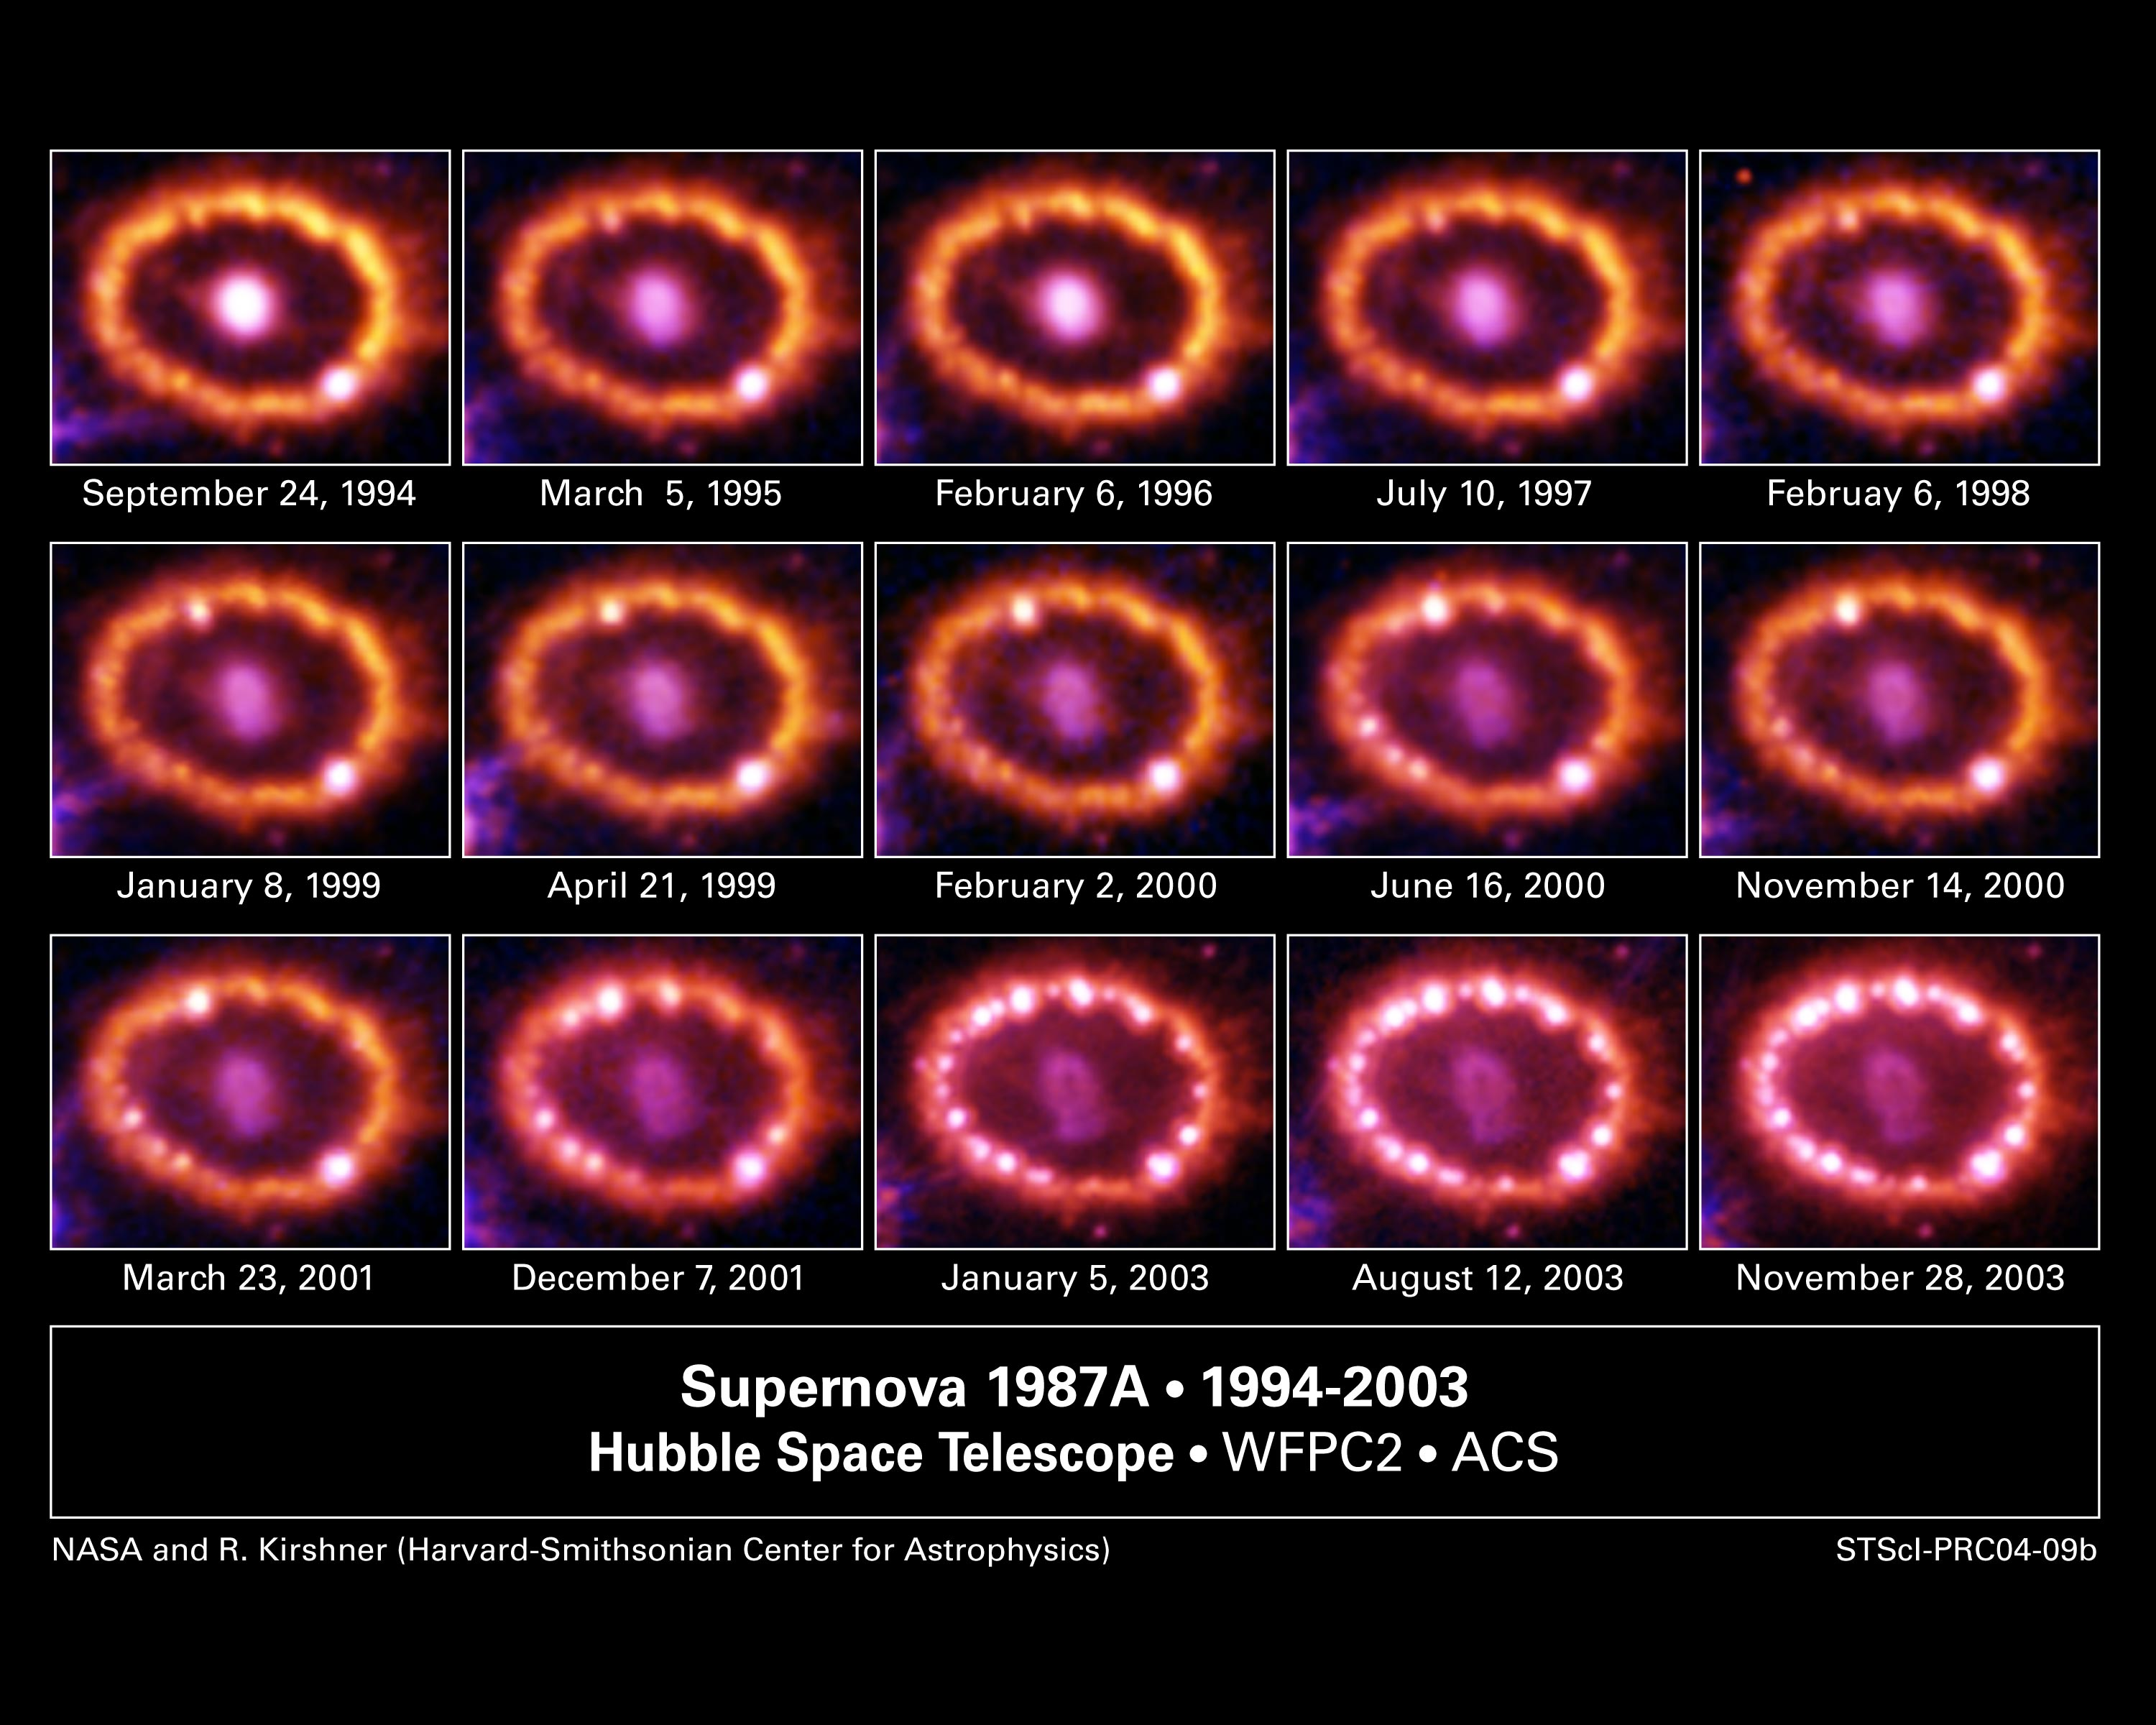

Hubble Supernova 1987A Scrapbook (1994-2003)

Since its launch in 1990, NASA/ESA Hubble Space Telescope has watched a celestial drama unfold at a stellar demolition site. A shock wave unleashed during a stellar explosion, called Supernova 1987A (SN 1987A), has been racing toward a ring of matter encircling the blast site. Astronomers used Hubble to monitor the ring for signs of the impending bombardment. They detected the first evidence of a collision in 1996 [the bright spot at 11 o'clock in the Feb. 6, 1998 image]. Subsequent observations show dozens more "hot spots" as the blast wave slammed into the ring, compressing and heating the gas, and making it glow.

Credit: NASA/ESA, P. Challis, R. Kirshner (Harvard-Smithsonian Center for Astrophysics) and B. Sugerman (STScI)